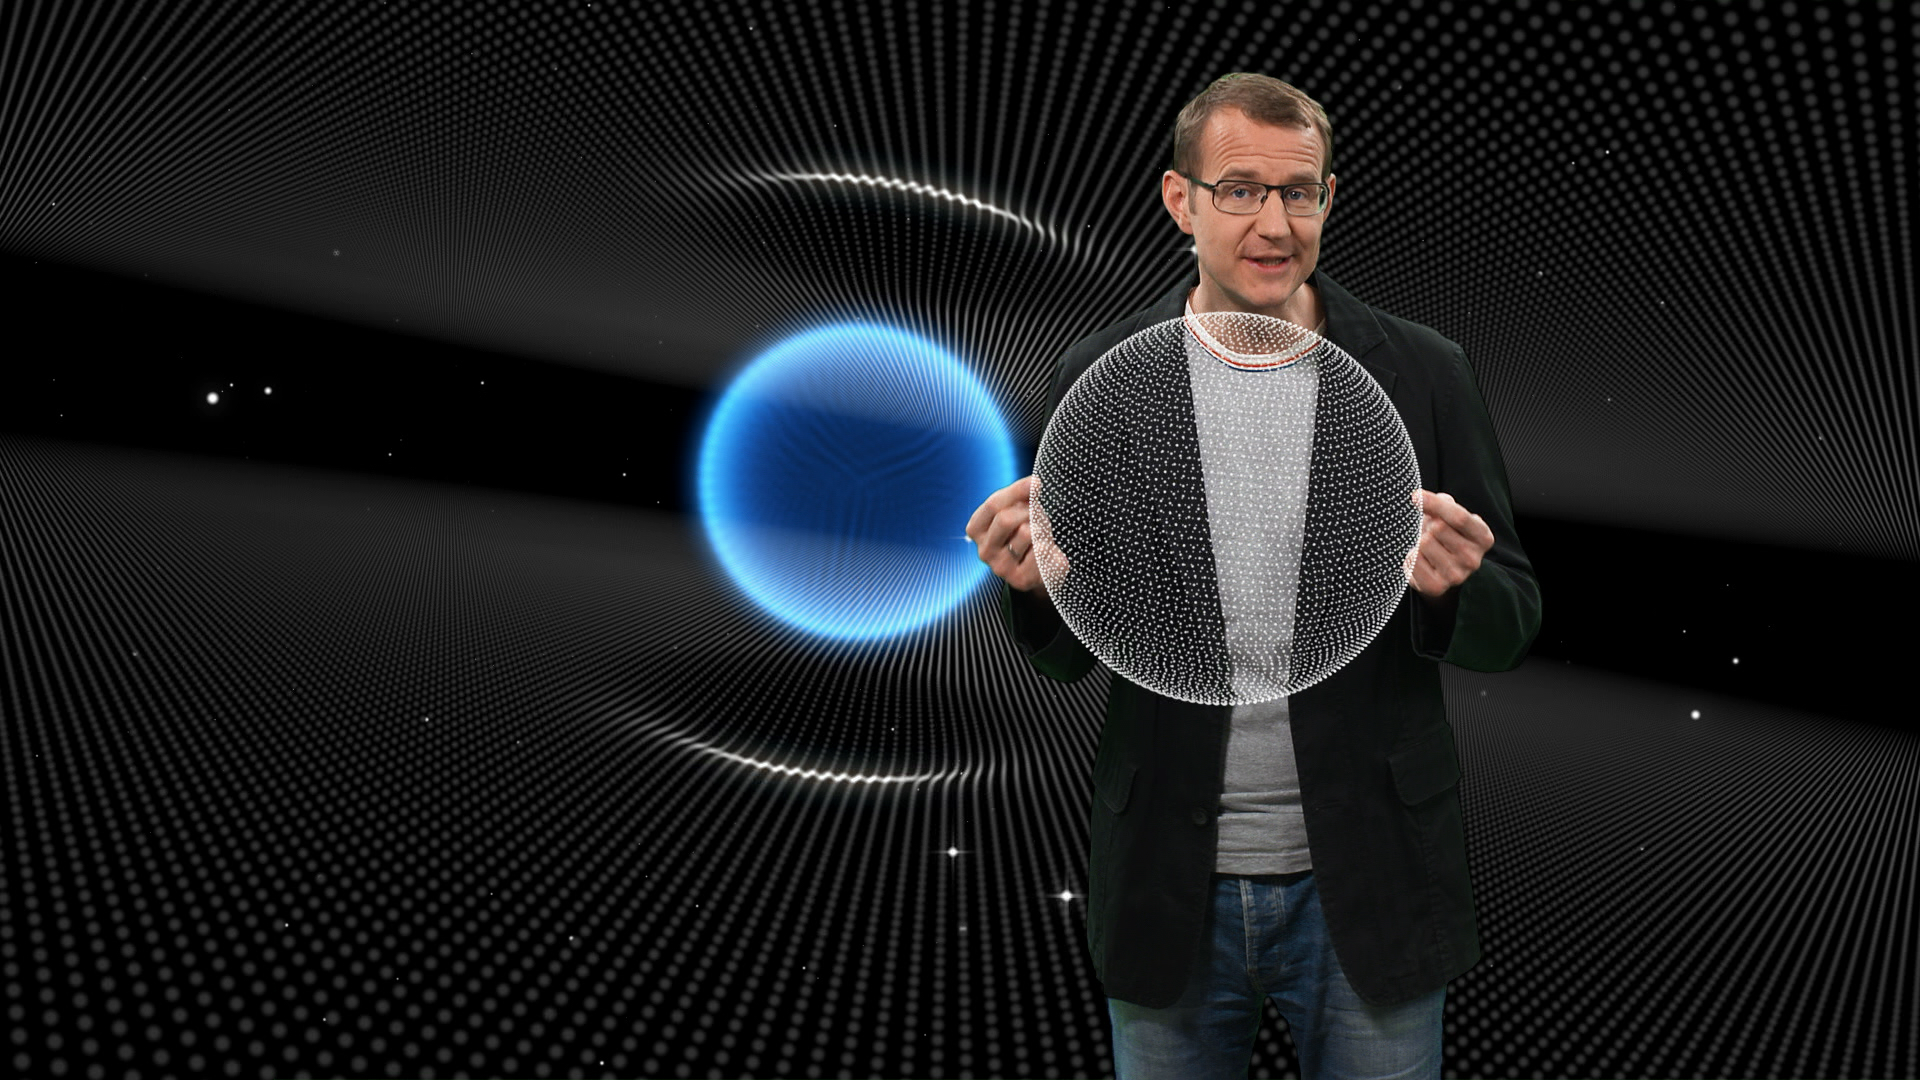

Screenshot of Hubblecast 70

Screenshot of Hubblecast 70: Peering around cosmic corners.

Credit: NASA & ESA